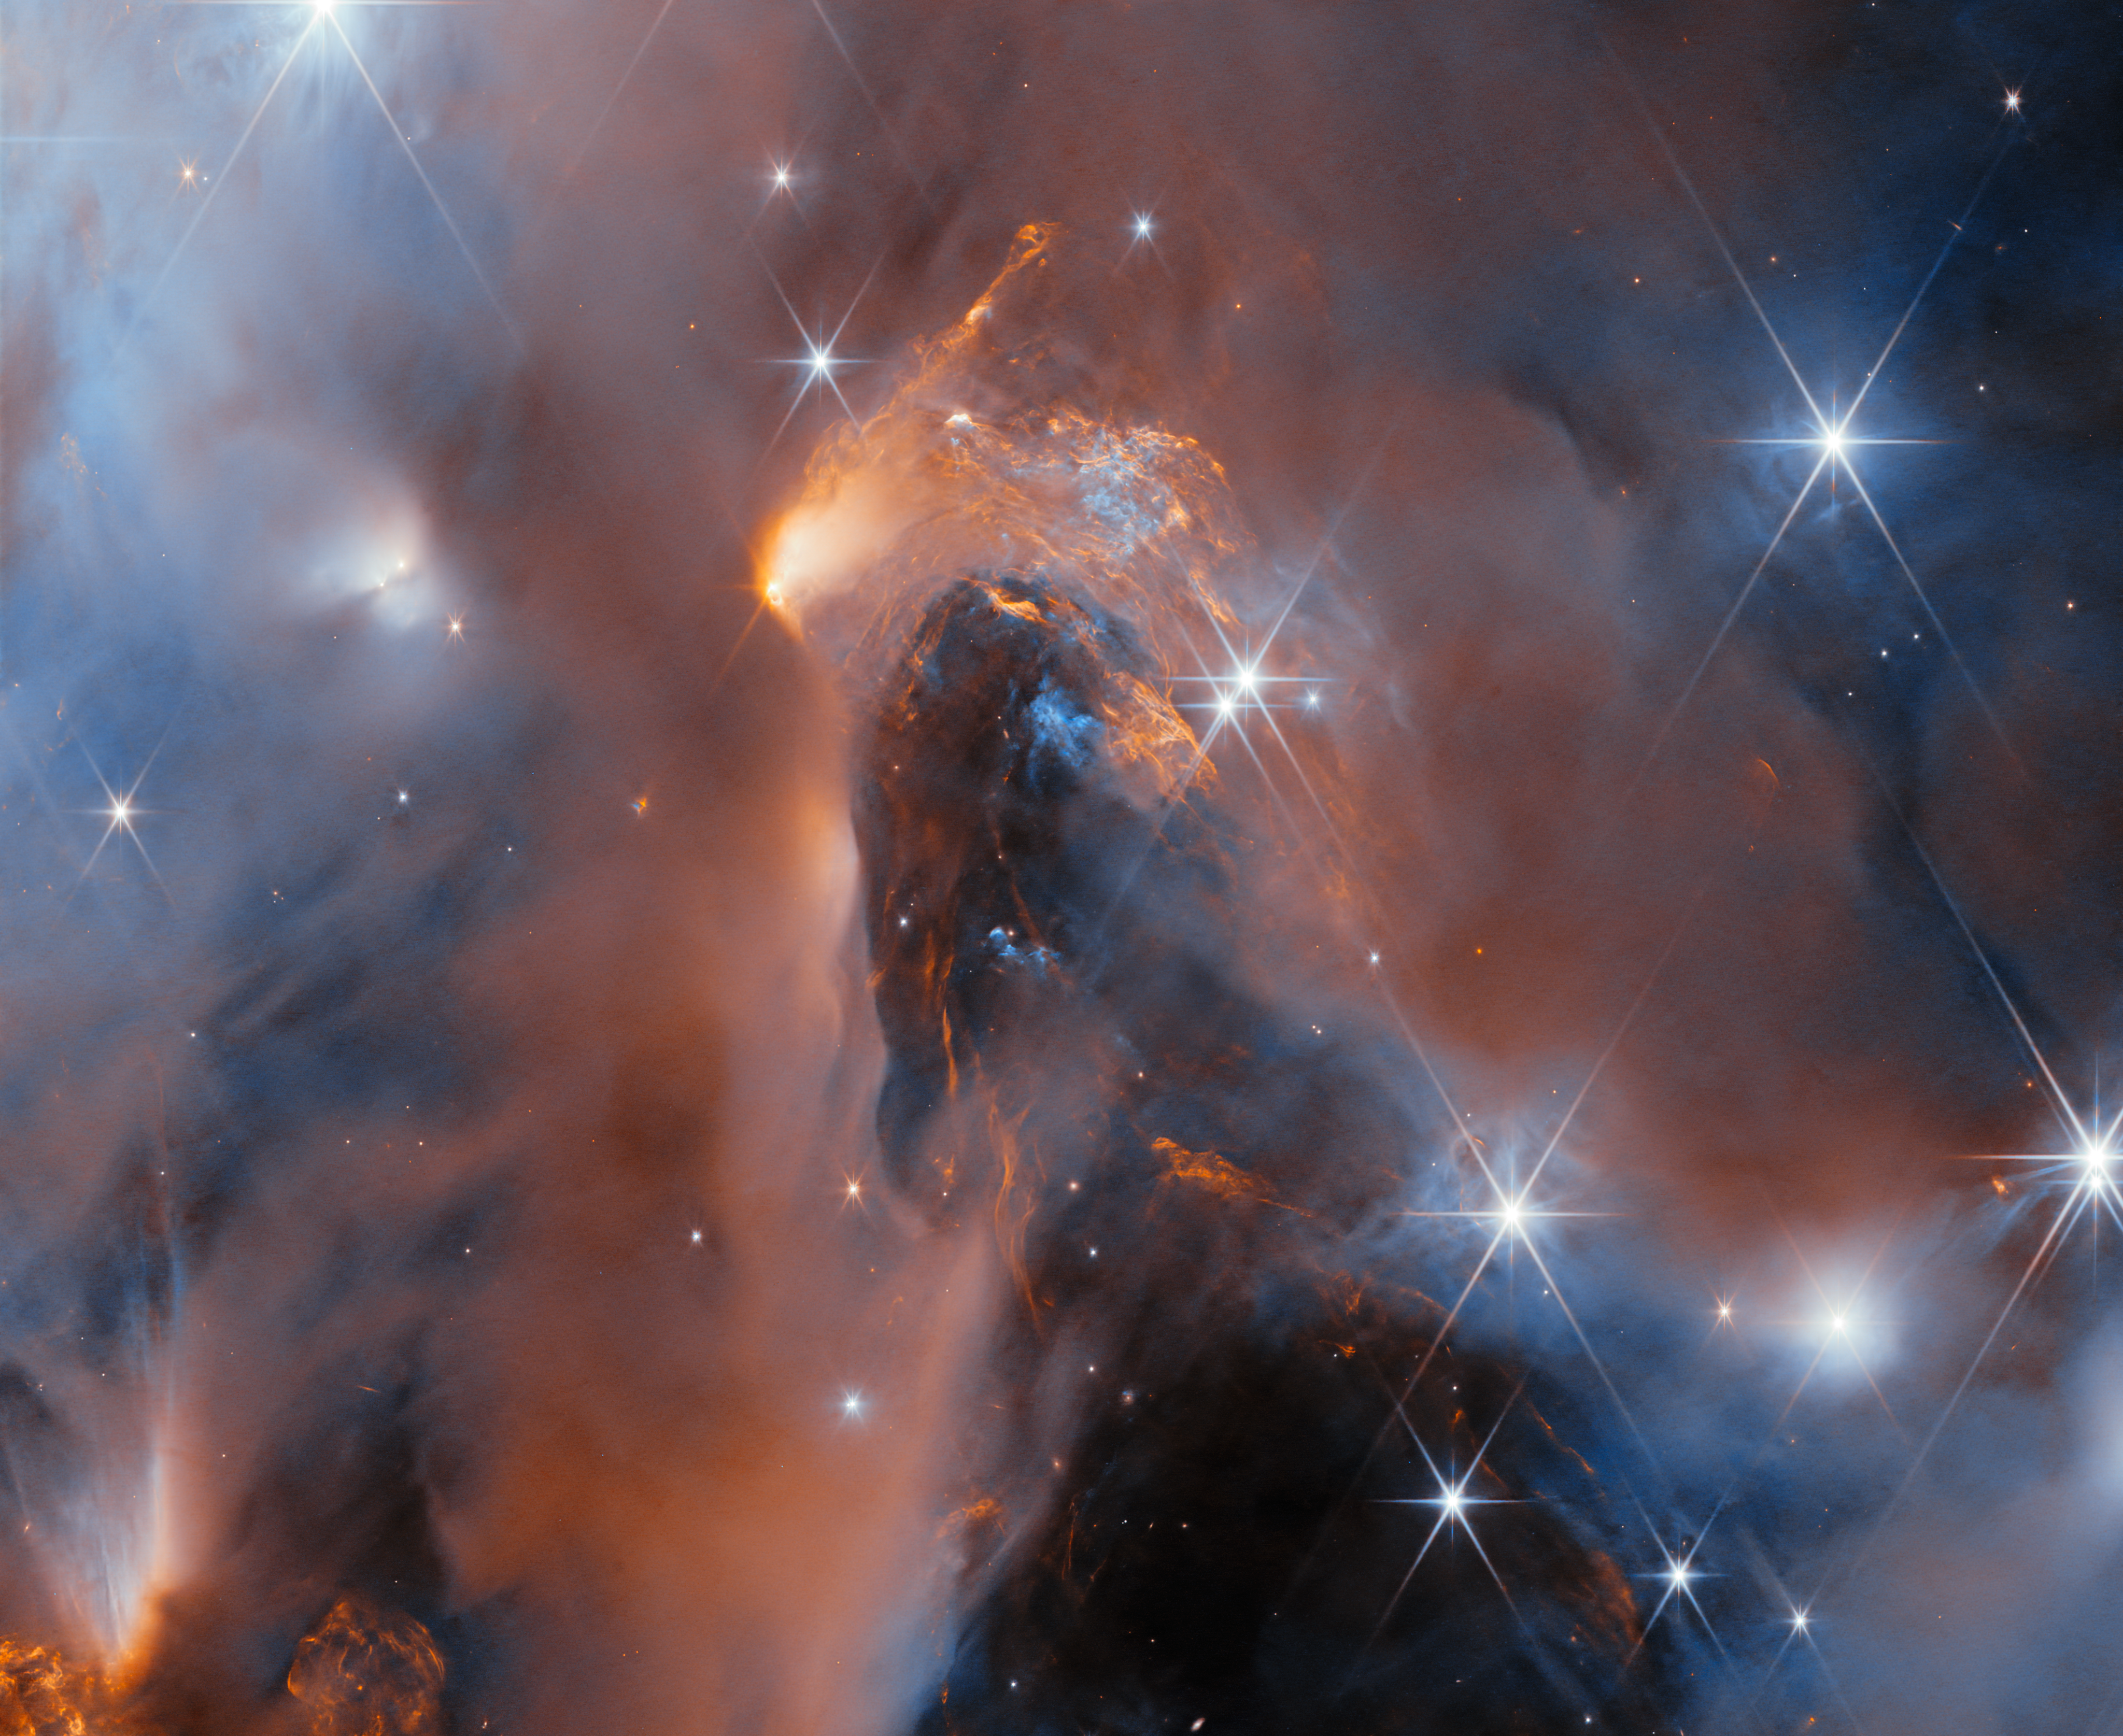

Peeking into Perseus

This stunning new mosaic of images from the NASA/ESA/CSA James Webb Space Telescope showcases the nearby star-forming cluster, NGC 1333. The nebula is in the Perseus molecular cloud, and located approximately 960 light-years away.

Webb’s superb sensitivity allows astronomers to investigate young objects with extremely low masses. Some of the faintest ‘stars’ in the picture are in fact newly born free-floating brown dwarfs with masses comparable to those of giant planets.

The same cluster was featured as the 33rd anniversary image of the NASA/ESA Hubble Space Telescope in April of 2023. Hubble’s image just scratched the surface of this region, because clouds of dust obscure much of the star formation process. Observing with a larger aperture and in the infrared part of the spectrum, Webb is capable of peering through the dusty veil to reveal newborn stars, brown dwarfs and planetary mass objects.

The centre of the image presents a deep peek into the heart of the NGC 1333 cloud. Across the image we see large patches of orange, which represent gas glowing in the infrared. These so-called Herbig-Haro objects form when ionised material ejected from young stars collides with the surrounding cloud. They are hallmarks of a very active site of star formation.

Many of the young stars in this image are surrounded by discs of gas and dust, which may eventually produce planetary systems. On the right hand side of the image, we can glimpse the shadow of one of these discs oriented edge-on — two dark cones emanating from opposite sides, seen against a bright background.

Similarly to the young stars in this mosaic, our own Sun and planets formed inside a dusty molecular cloud, 4.6 billion years ago. Our Sun didn’t form in isolation but as part of a cluster, which was perhaps even more massive than NGC 1333. The cluster in the mosaic, only 1–3 million years old, presents us with an opportunity to study stars like our Sun, as well as brown dwarfs and free-floating planets, in their nascent stages.

The images were captured as part of the Webb observation programme 1202 (PI: A. Scholz) to survey a large portion of NGC 1333. These data constitute the first deep spectroscopic survey of the young cluster, and have identified brown dwarfs down to planetary masses using the observatory’s Near-InfraRed Imager and Slitless Spectrograph (NIRISS). The first results from this survey have been accepted for publication in the Astronomical Journal.

Credit: ESA/Webb, NASA & CSA, A. Scholz, K. Muzic, A. Langeveld, R. Jayawardhana